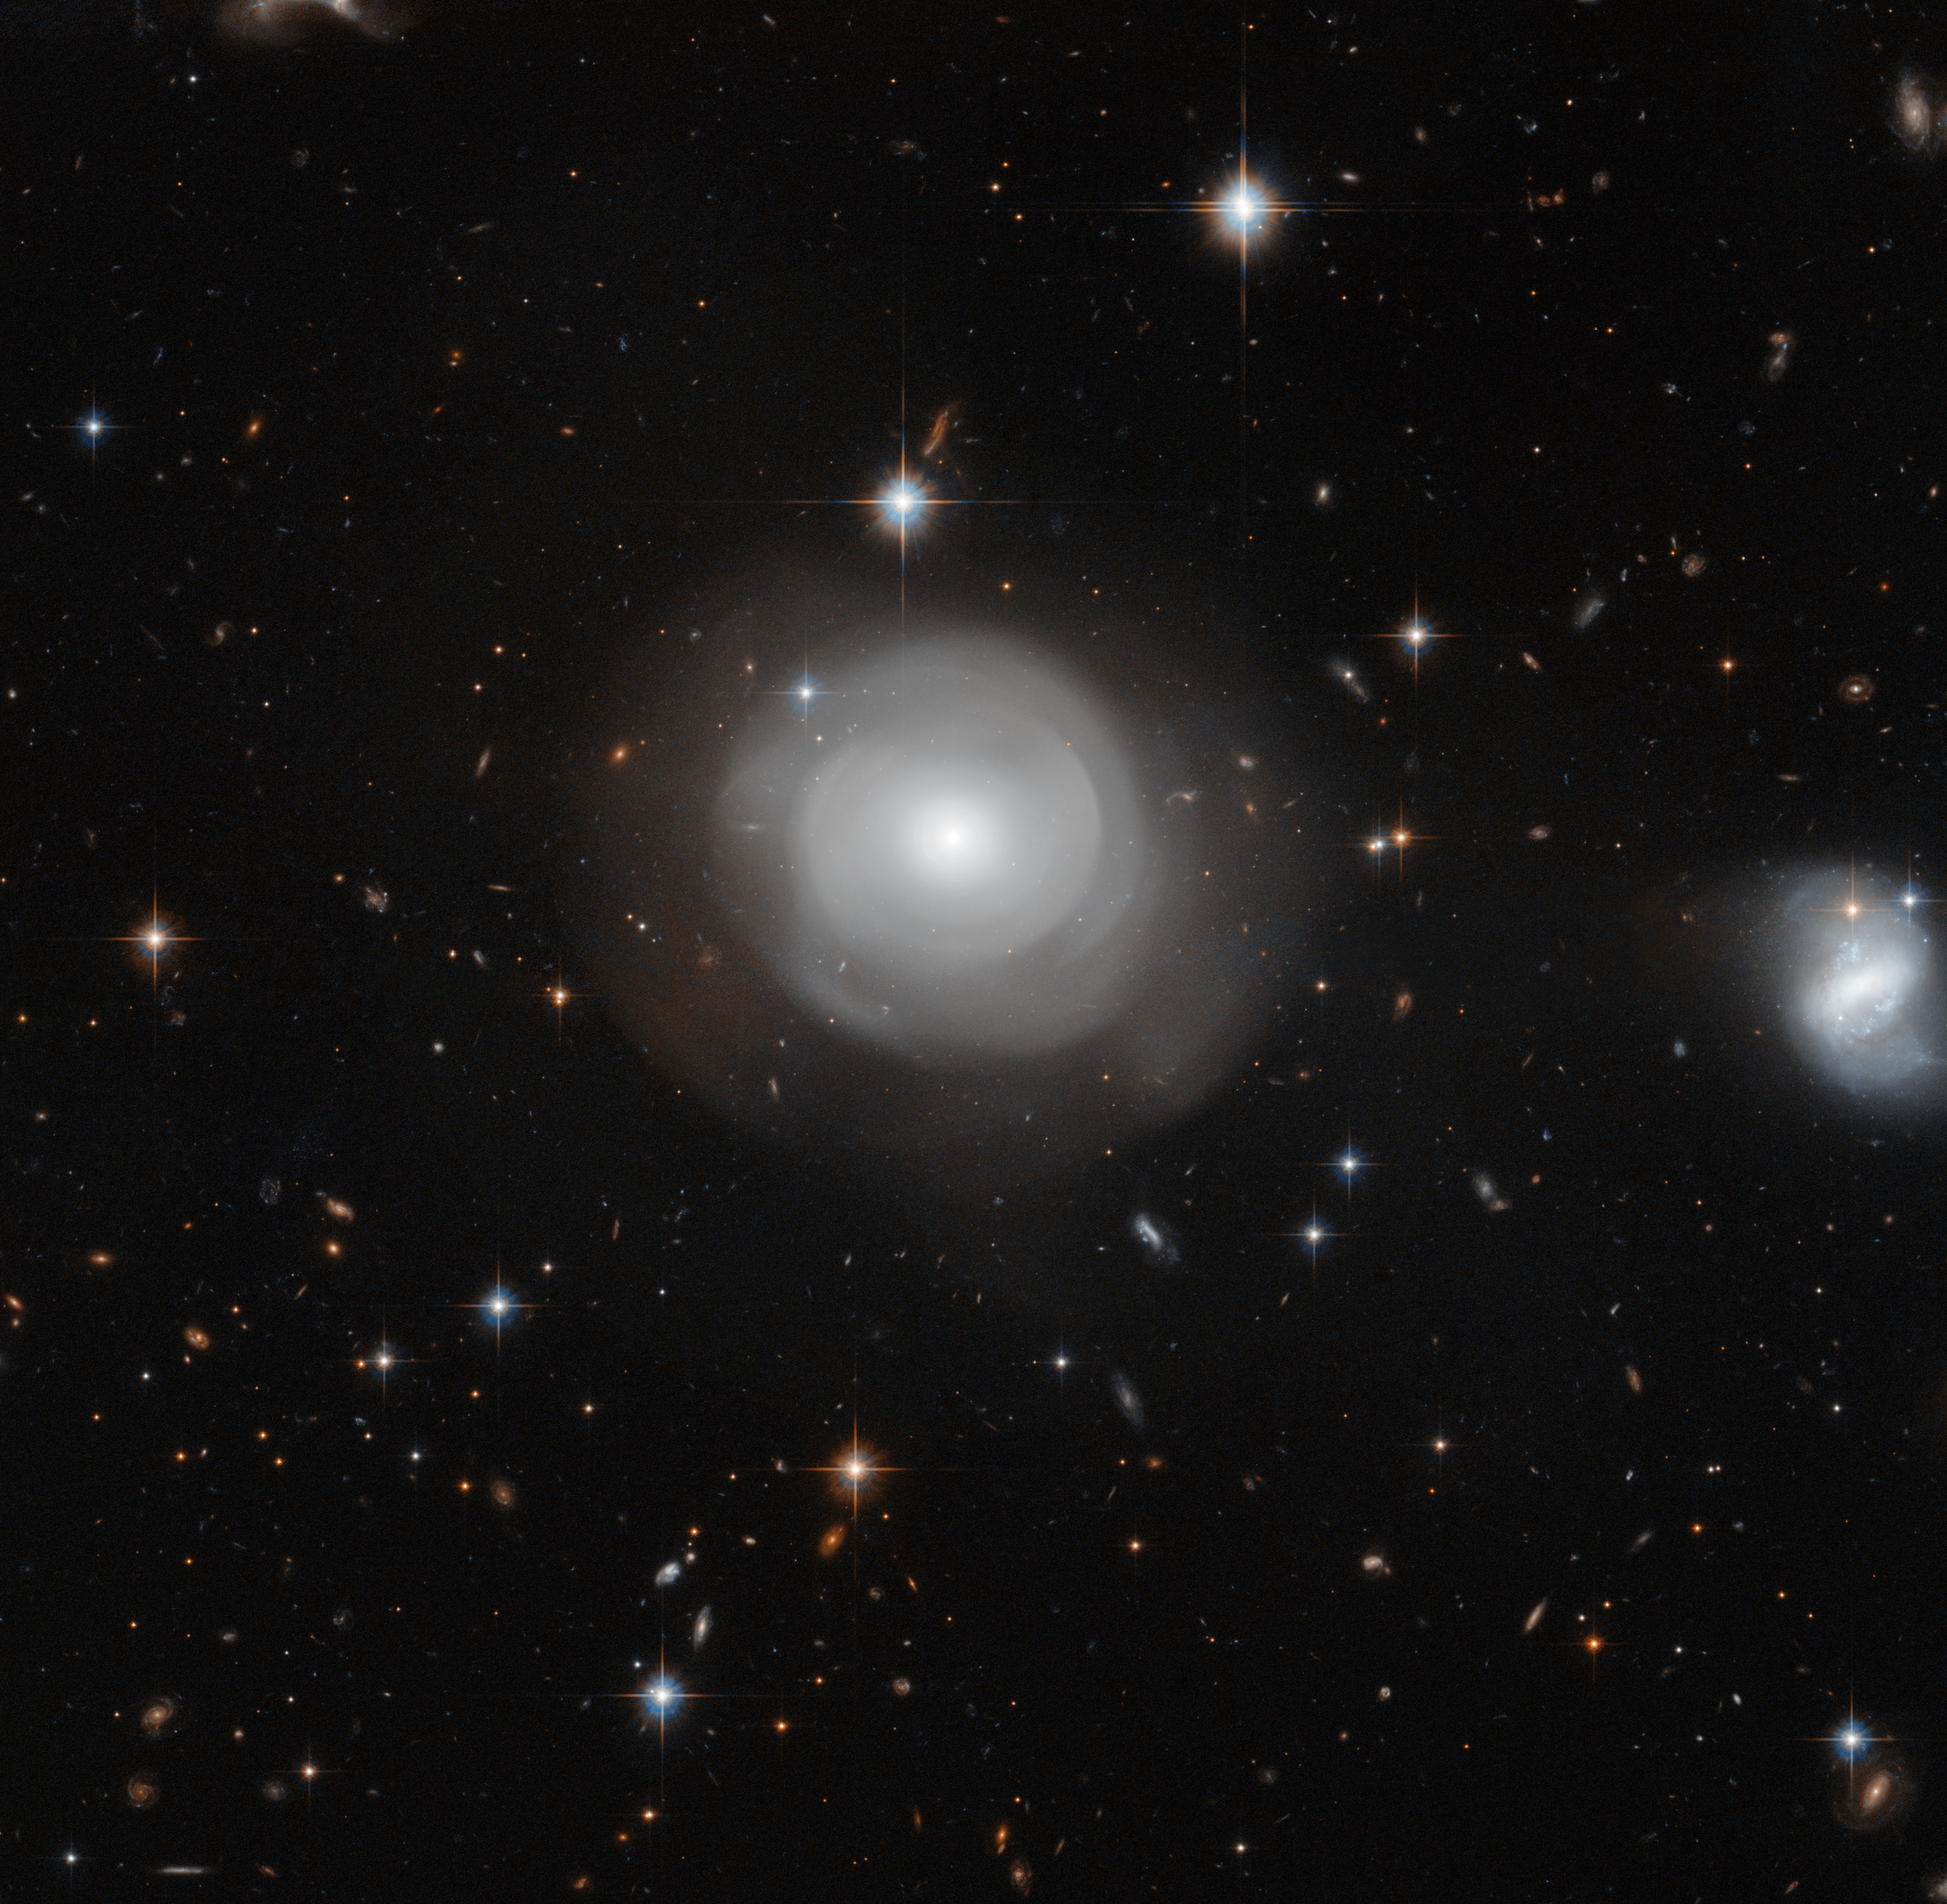

Hubble image of ESO 381-12

The ghostly shells of galaxy ESO 381-12 are captured here in a new image from the NASA/ESA Hubble Space Telescope, set against a backdrop of distant galaxies. The strikingly uneven structure and the clusters of stars that orbit around the galaxy suggest that ESO 381-12 may have been part of a dramatic collision sometime in its relatively recent past.

Credit: NASA, ESA, P. Goudfrooij (STScI)